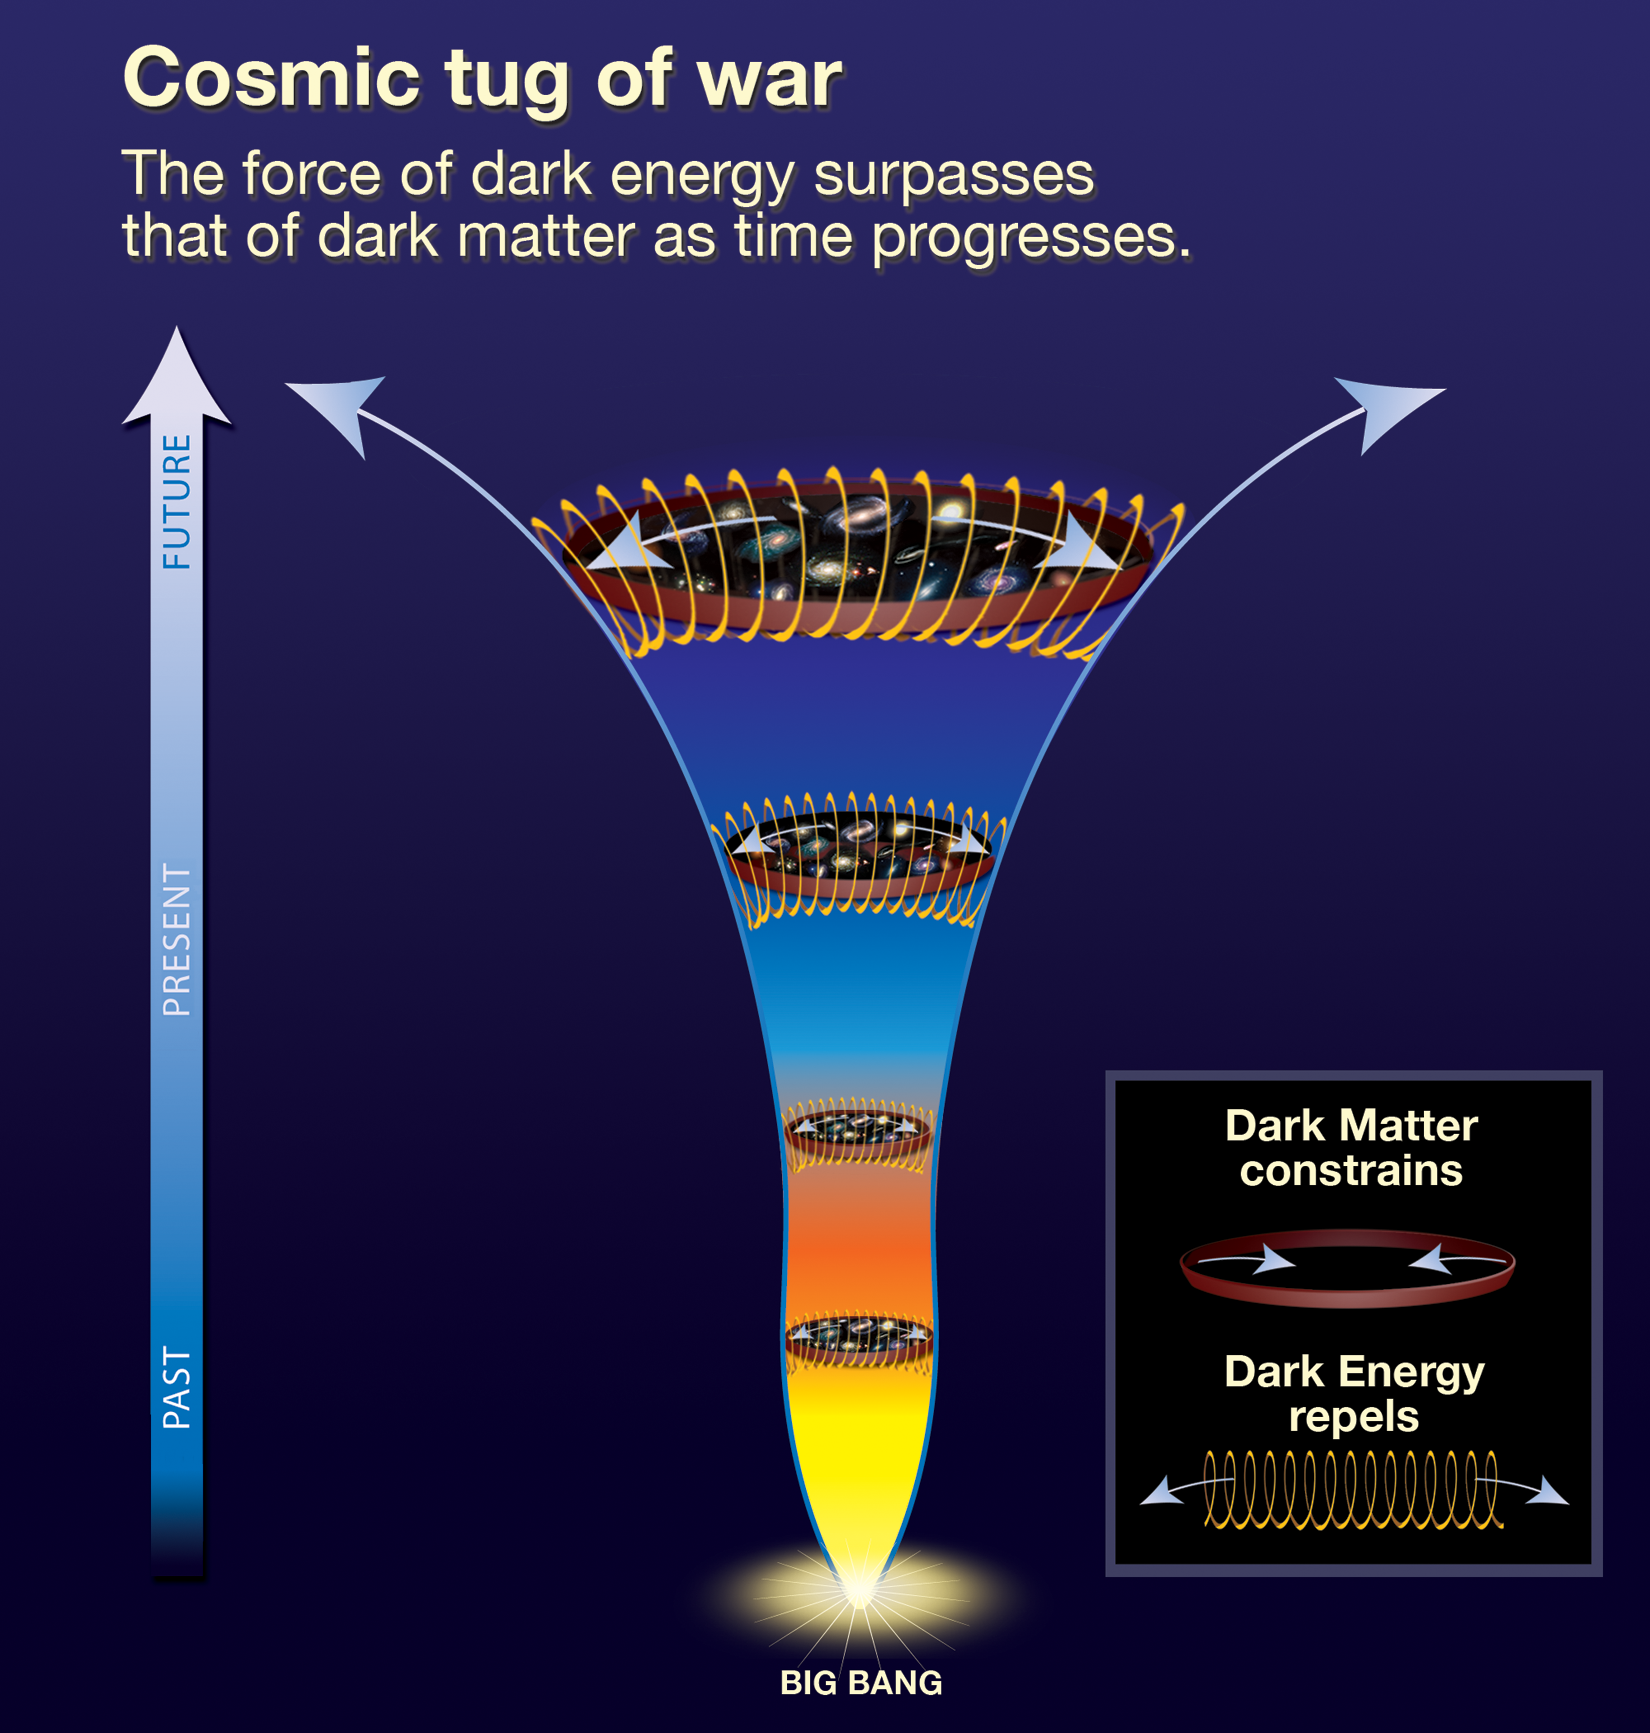

History of the Universe

Scientists using NASA's Hubble Space Telescope have discovered that dark energy is not a new constituent of space, but rather has been present for most of the universe's history. Dark energy is a mysterious repulsive force that causes the universe to expand at an increasing rate.

Credit: NASA, ESA, and A. Feild (STScI)